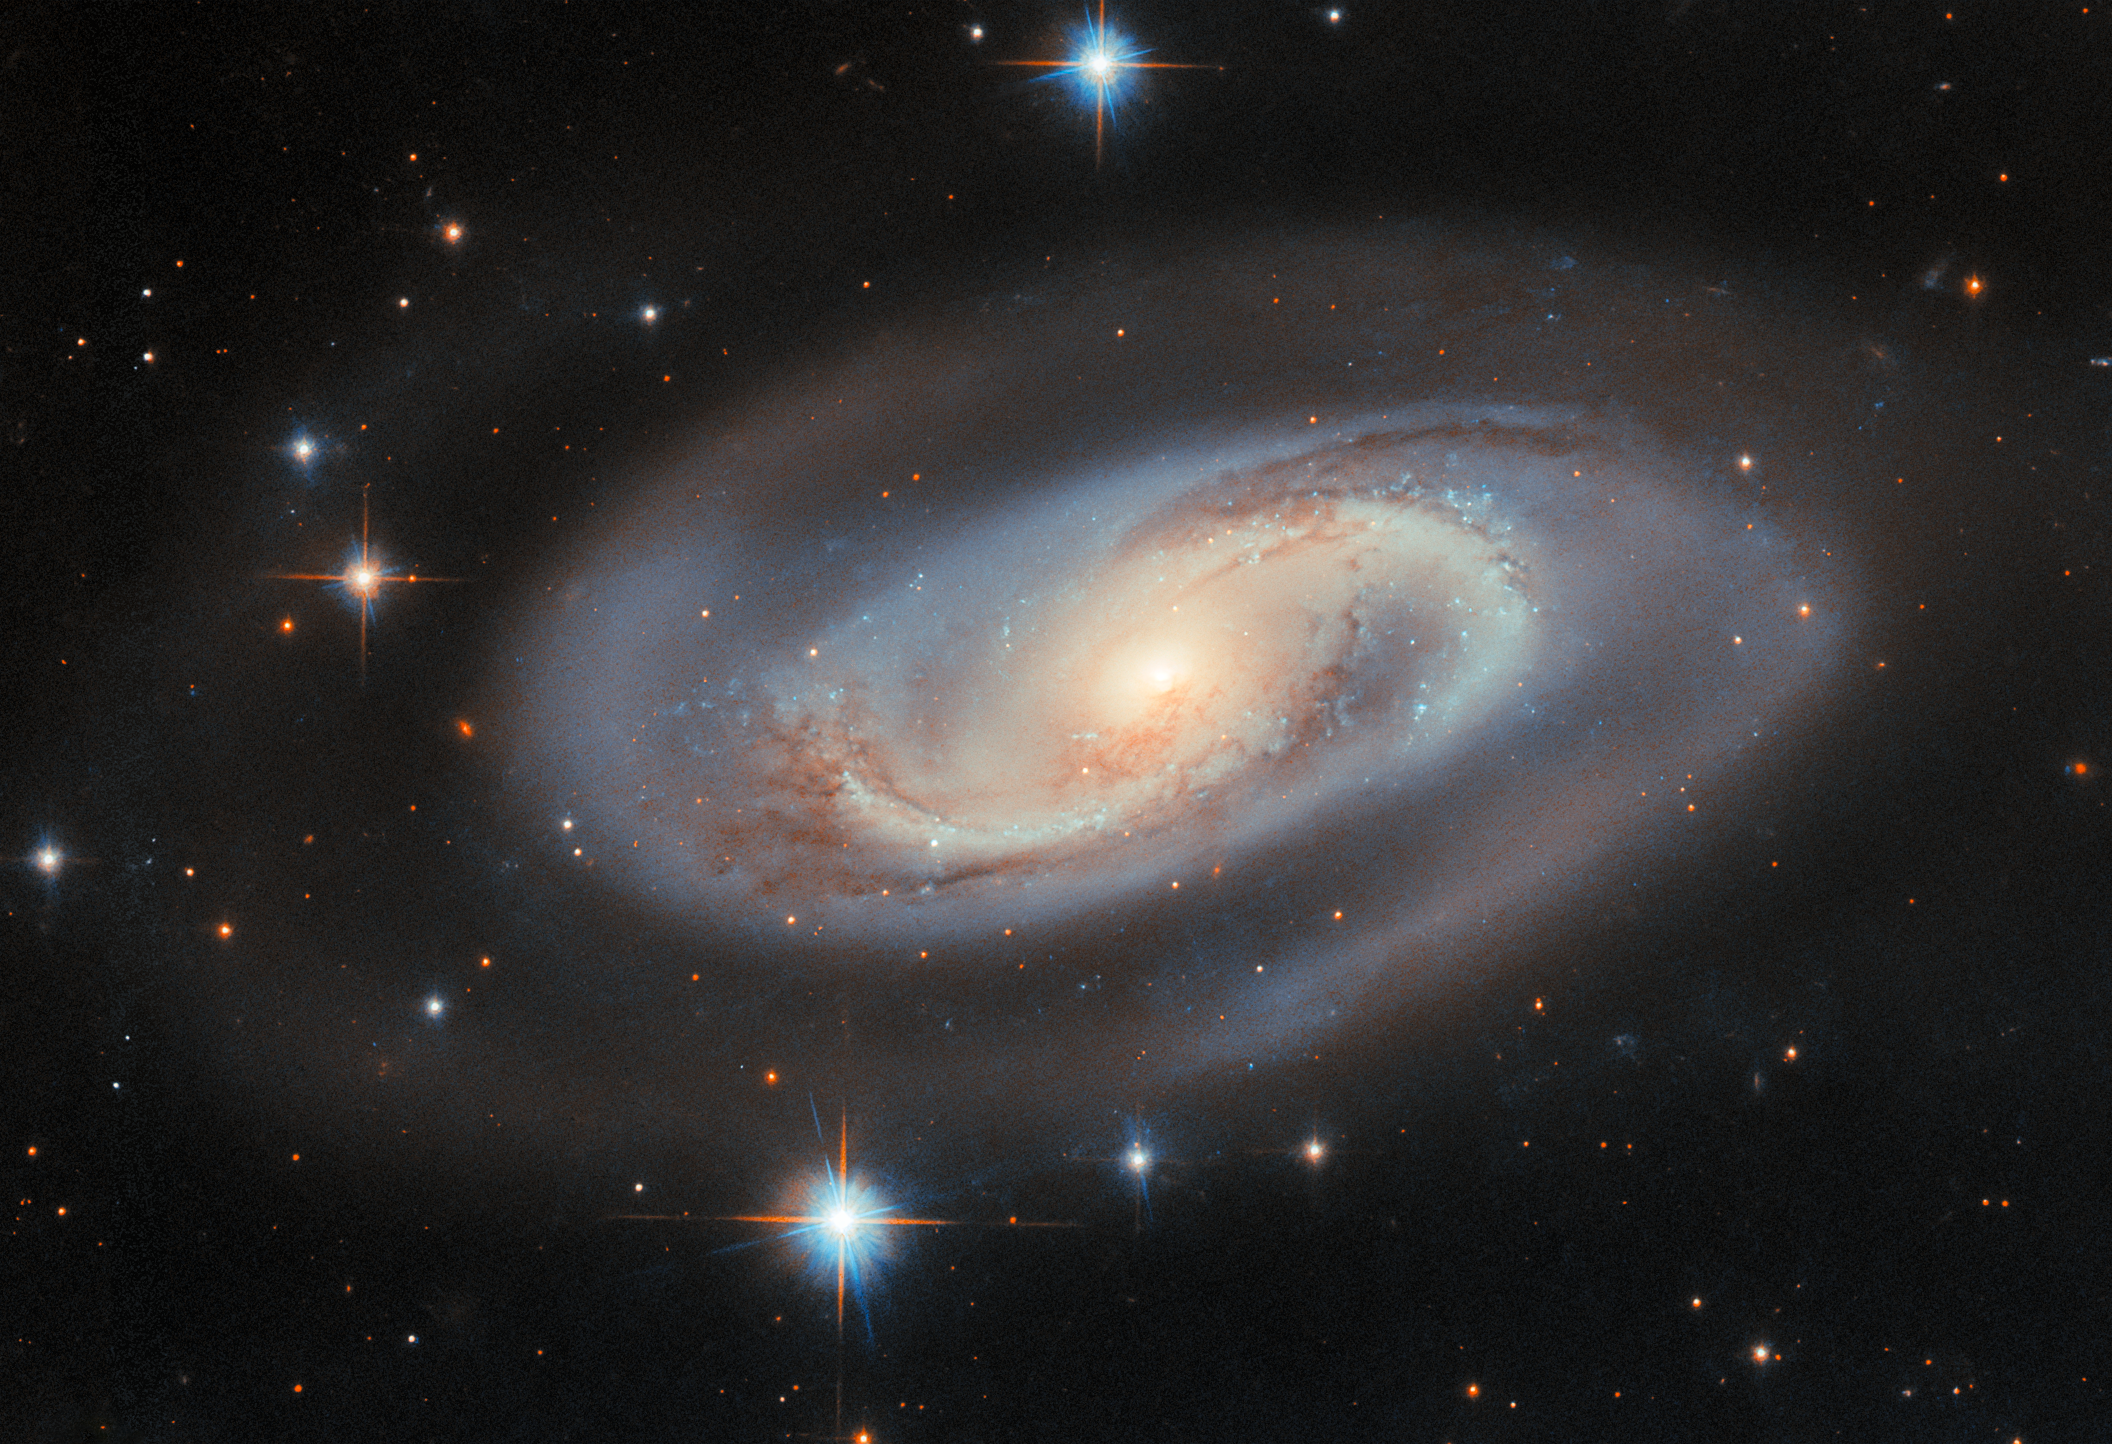

Centre of activity

The light that the NASA/ESA Hubble Space Telescope collected to create this Picture of the Week reached the telescope after a journey of 250 million years. Its source was the spiral galaxy UGC 11397, which resides in the constellation Lyra (The Lyre). At first glance, UGC 11397 appears to be an average spiral galaxy: it sports two graceful spiral arms that are illuminated by stars and defined by dark, clumpy clouds of dust.

What sets UGC 11397 apart from a typical spiral lies at its centre, where a supermassive black hole containing 174 million times the mass of the Sun is growing. As a black hole ensnares gas, dust, and even entire stars from its vicinity, this doomed matter heats up and puts on a fantastic cosmic light show. Material trapped by the black hole emits light from gamma rays to radio waves and can brighten and fade without warning. But in some galaxies, including UGC 11397, thick clouds of dust hide much of this energetic activity from view in optical light. Despite this, UGC 11397's actively growing black hole was revealed through its bright X-ray emission — high-energy light that can pierce the surrounding dust. This led astronomers to classify it as a Type 2 Seyfert galaxy, a category used for active galaxies whose central regions are hidden from view in visible light by a doughnut-shaped cloud of dust and gas.

Using Hubble, researchers will study hundreds of galaxies that, like UGC 11397, harbour a supermassive black hole that is gaining mass. The Hubble observations will help researchers weigh nearby supermassive black holes, understand how black holes grew early in the Universe’s history, and even study how stars form in the extreme environment found at the very centre of a galaxy.

Credit: ESA/Hubble & NASA, M. J. Koss, A. J. Barth